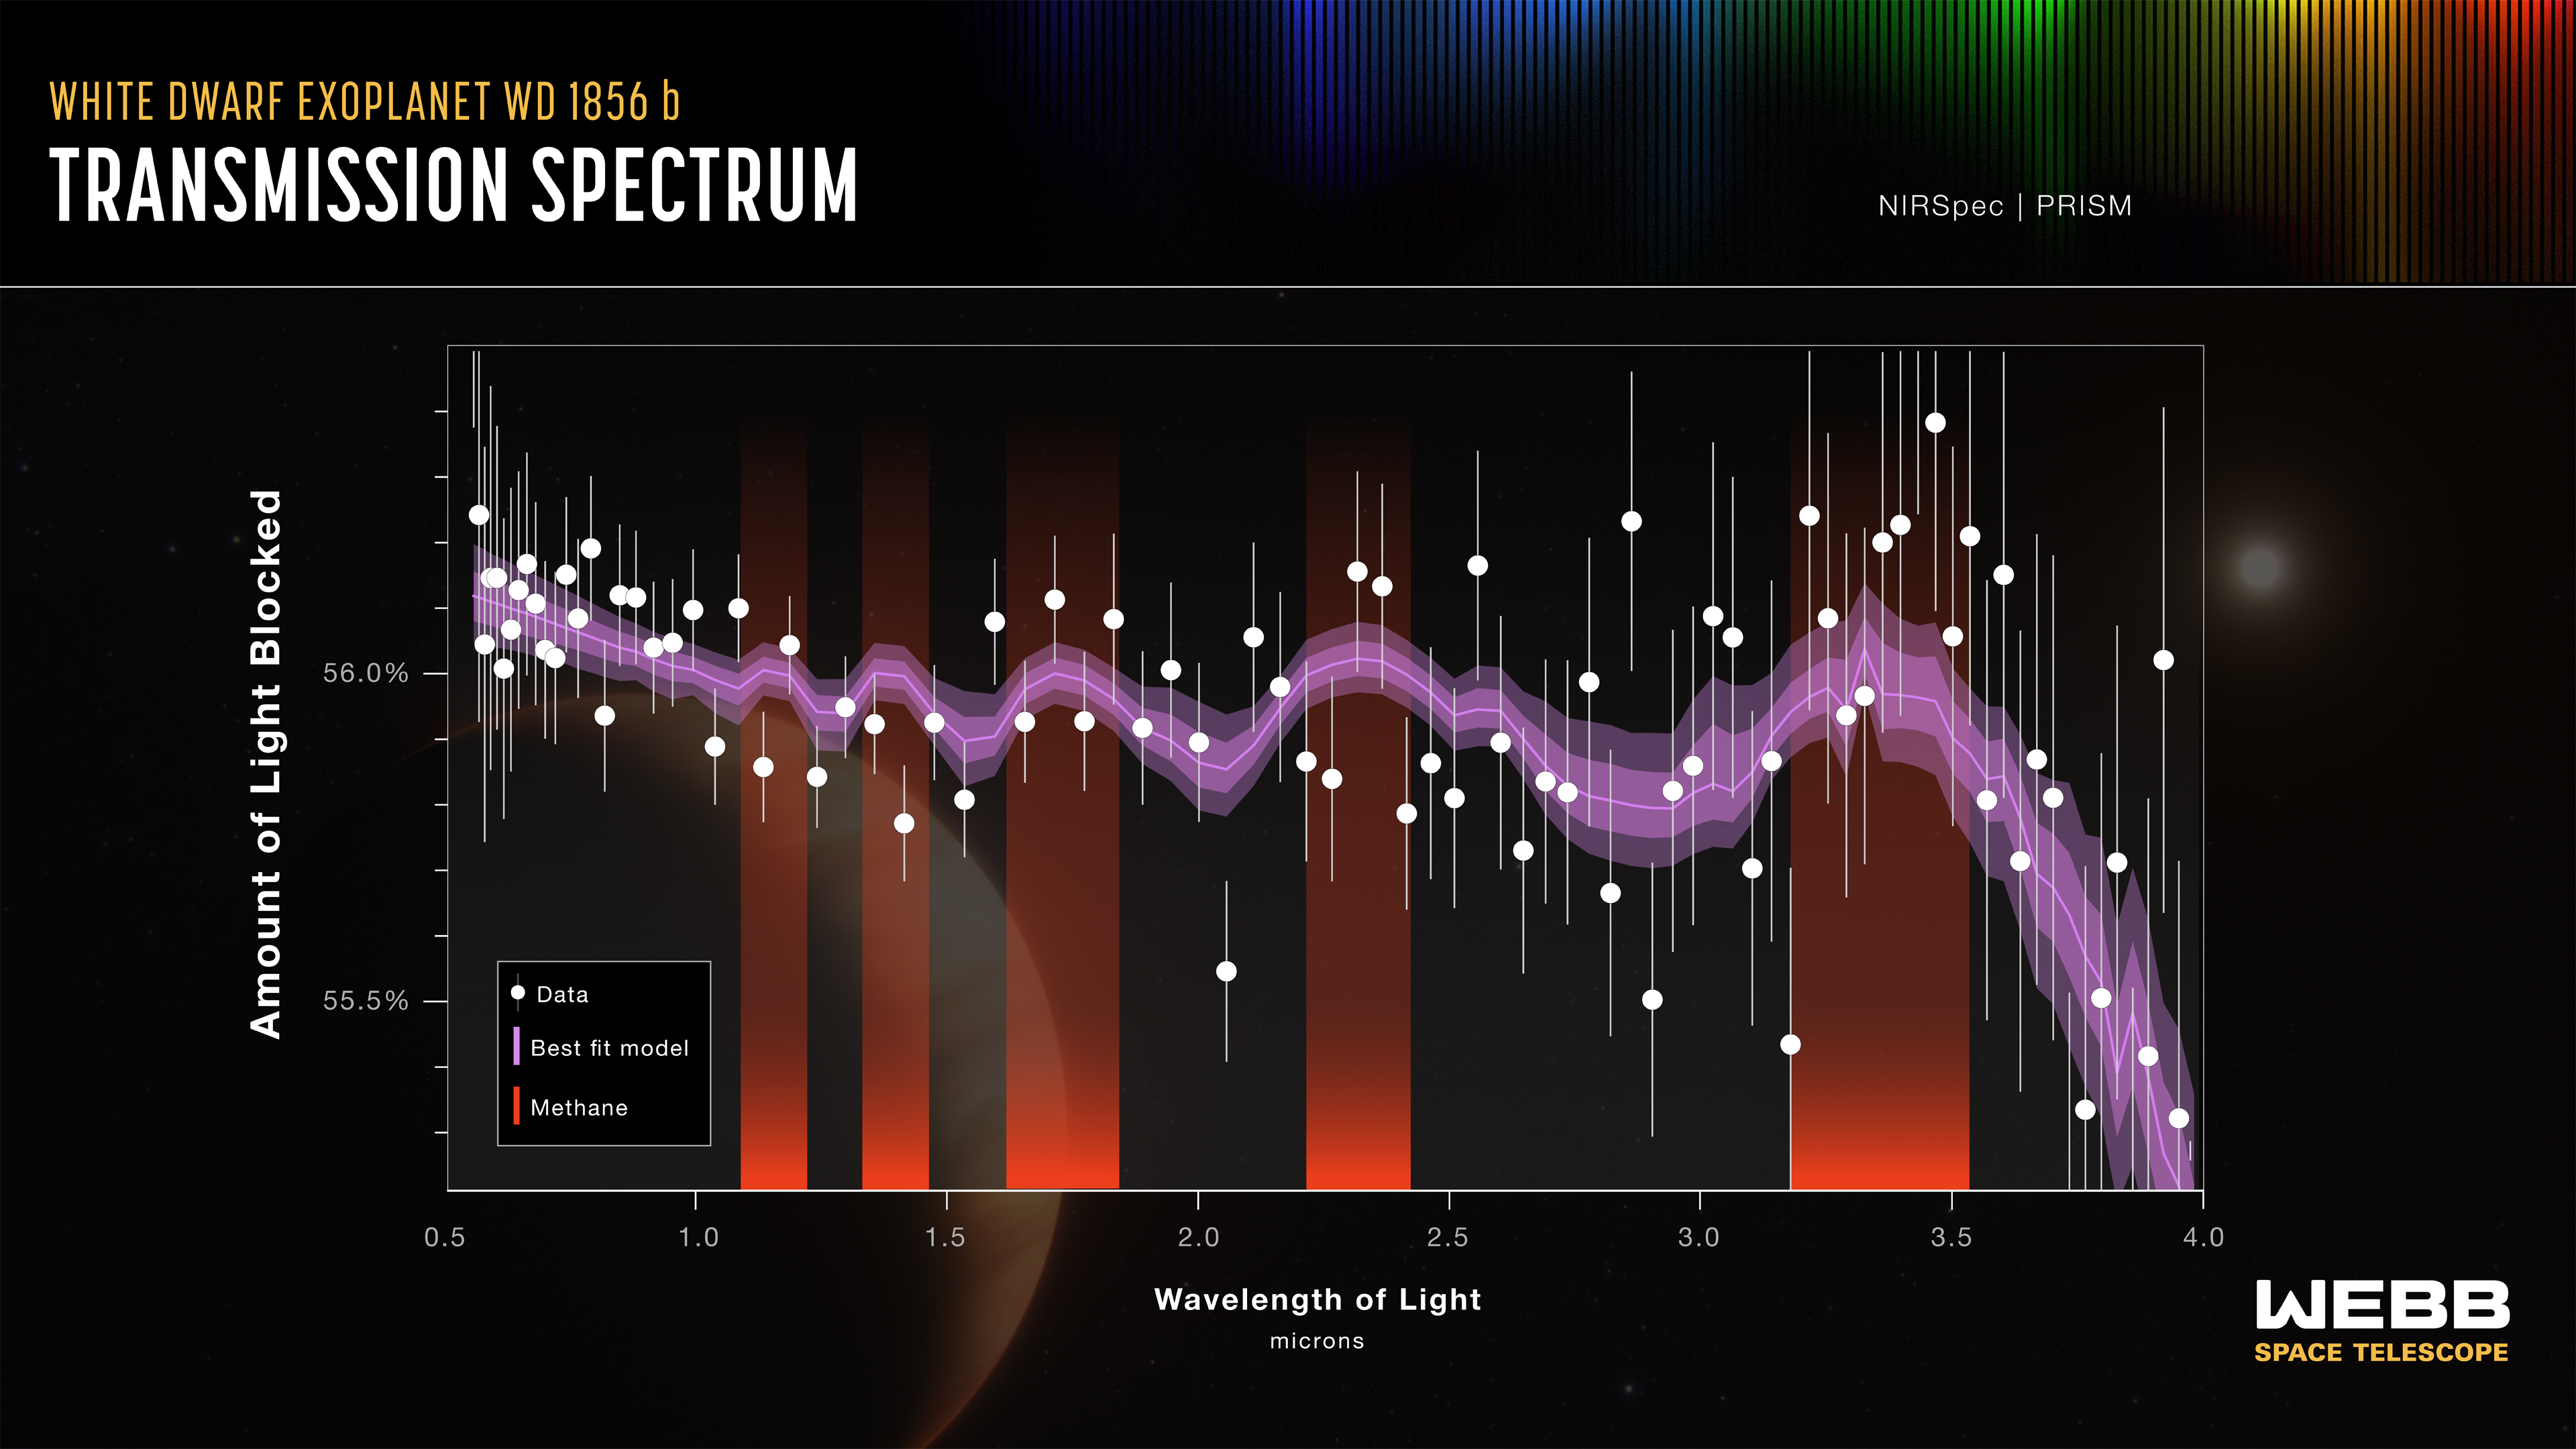

Exoplanet WD 1856 b NIRSpec transmission spectrum

The NASA/ESA/CSA James Webb Space Telescope measured the constituents of exoplanet WD 1856 b as it passed in front of its star, finding signs of methane. WD 1856 b orbits a white dwarf star the size of Earth. As a result, the planet blocks more than half of the star’s light. The red bands indicate where bumps in the spectrum show that this planet’s atmosphere contains methane.

Credit: NASA, ESA, CSA, J. Olmsted (STScI)